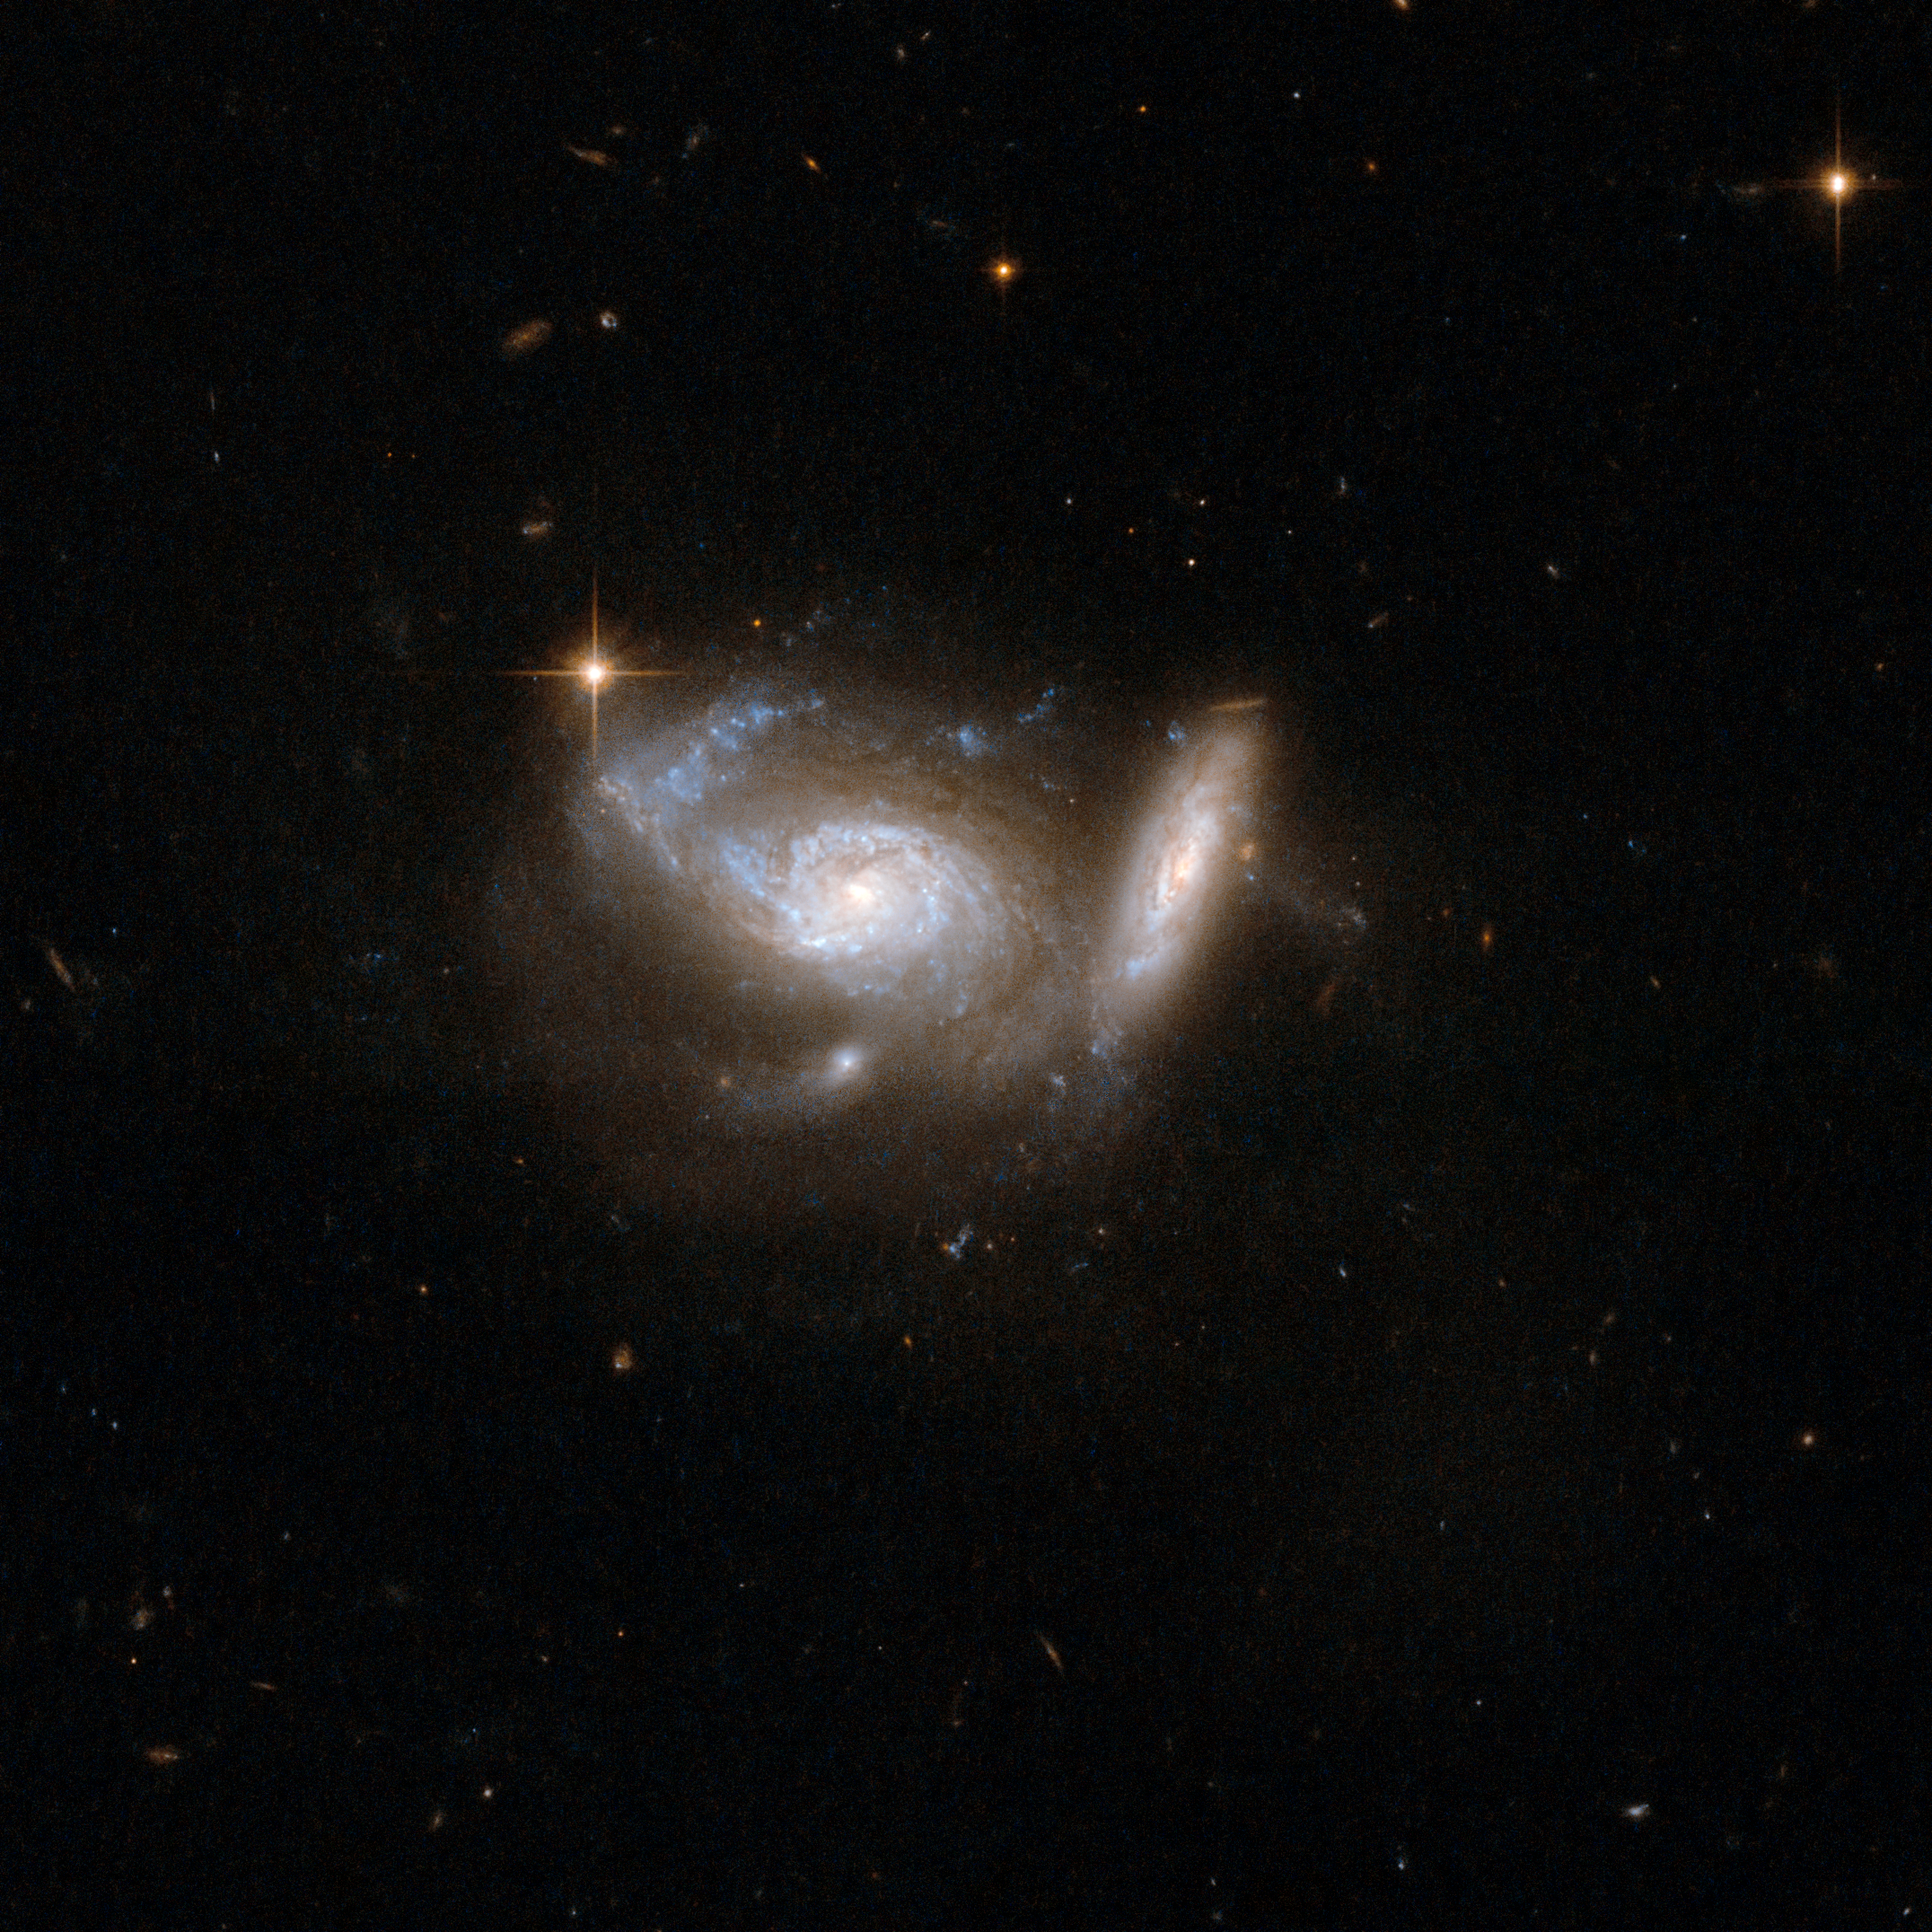

ESO 550-IG025

ESO550-IG025 shows a pair of spiral galaxies, the larger nearly face-on and accompanied by a smaller, highly tilted partner. Tidal interaction from the smaller companion has clearly deformed one arm of the larger galaxy. Strong star formation continues both in the deformed arm and in a ring structure around the galaxy's core. The pair is surrounded by the glow of faintly shining stars and interstellar matter that has been smeared through space by the gravitational effects of the collision and the pull of a third nearby galaxy.

This image is part of a large collection of 59 images of merging galaxies taken by the Hubble Space Telescope and released on the occasion of its 18th anniversary on 24th April 2008.

Credit: NASA, ESA, the Hubble Heritage Team (STScI/AURA)-ESA/Hubble Collaboration and A. Evans (University of Virginia, Charlottesville/NRAO/Stony Brook University)